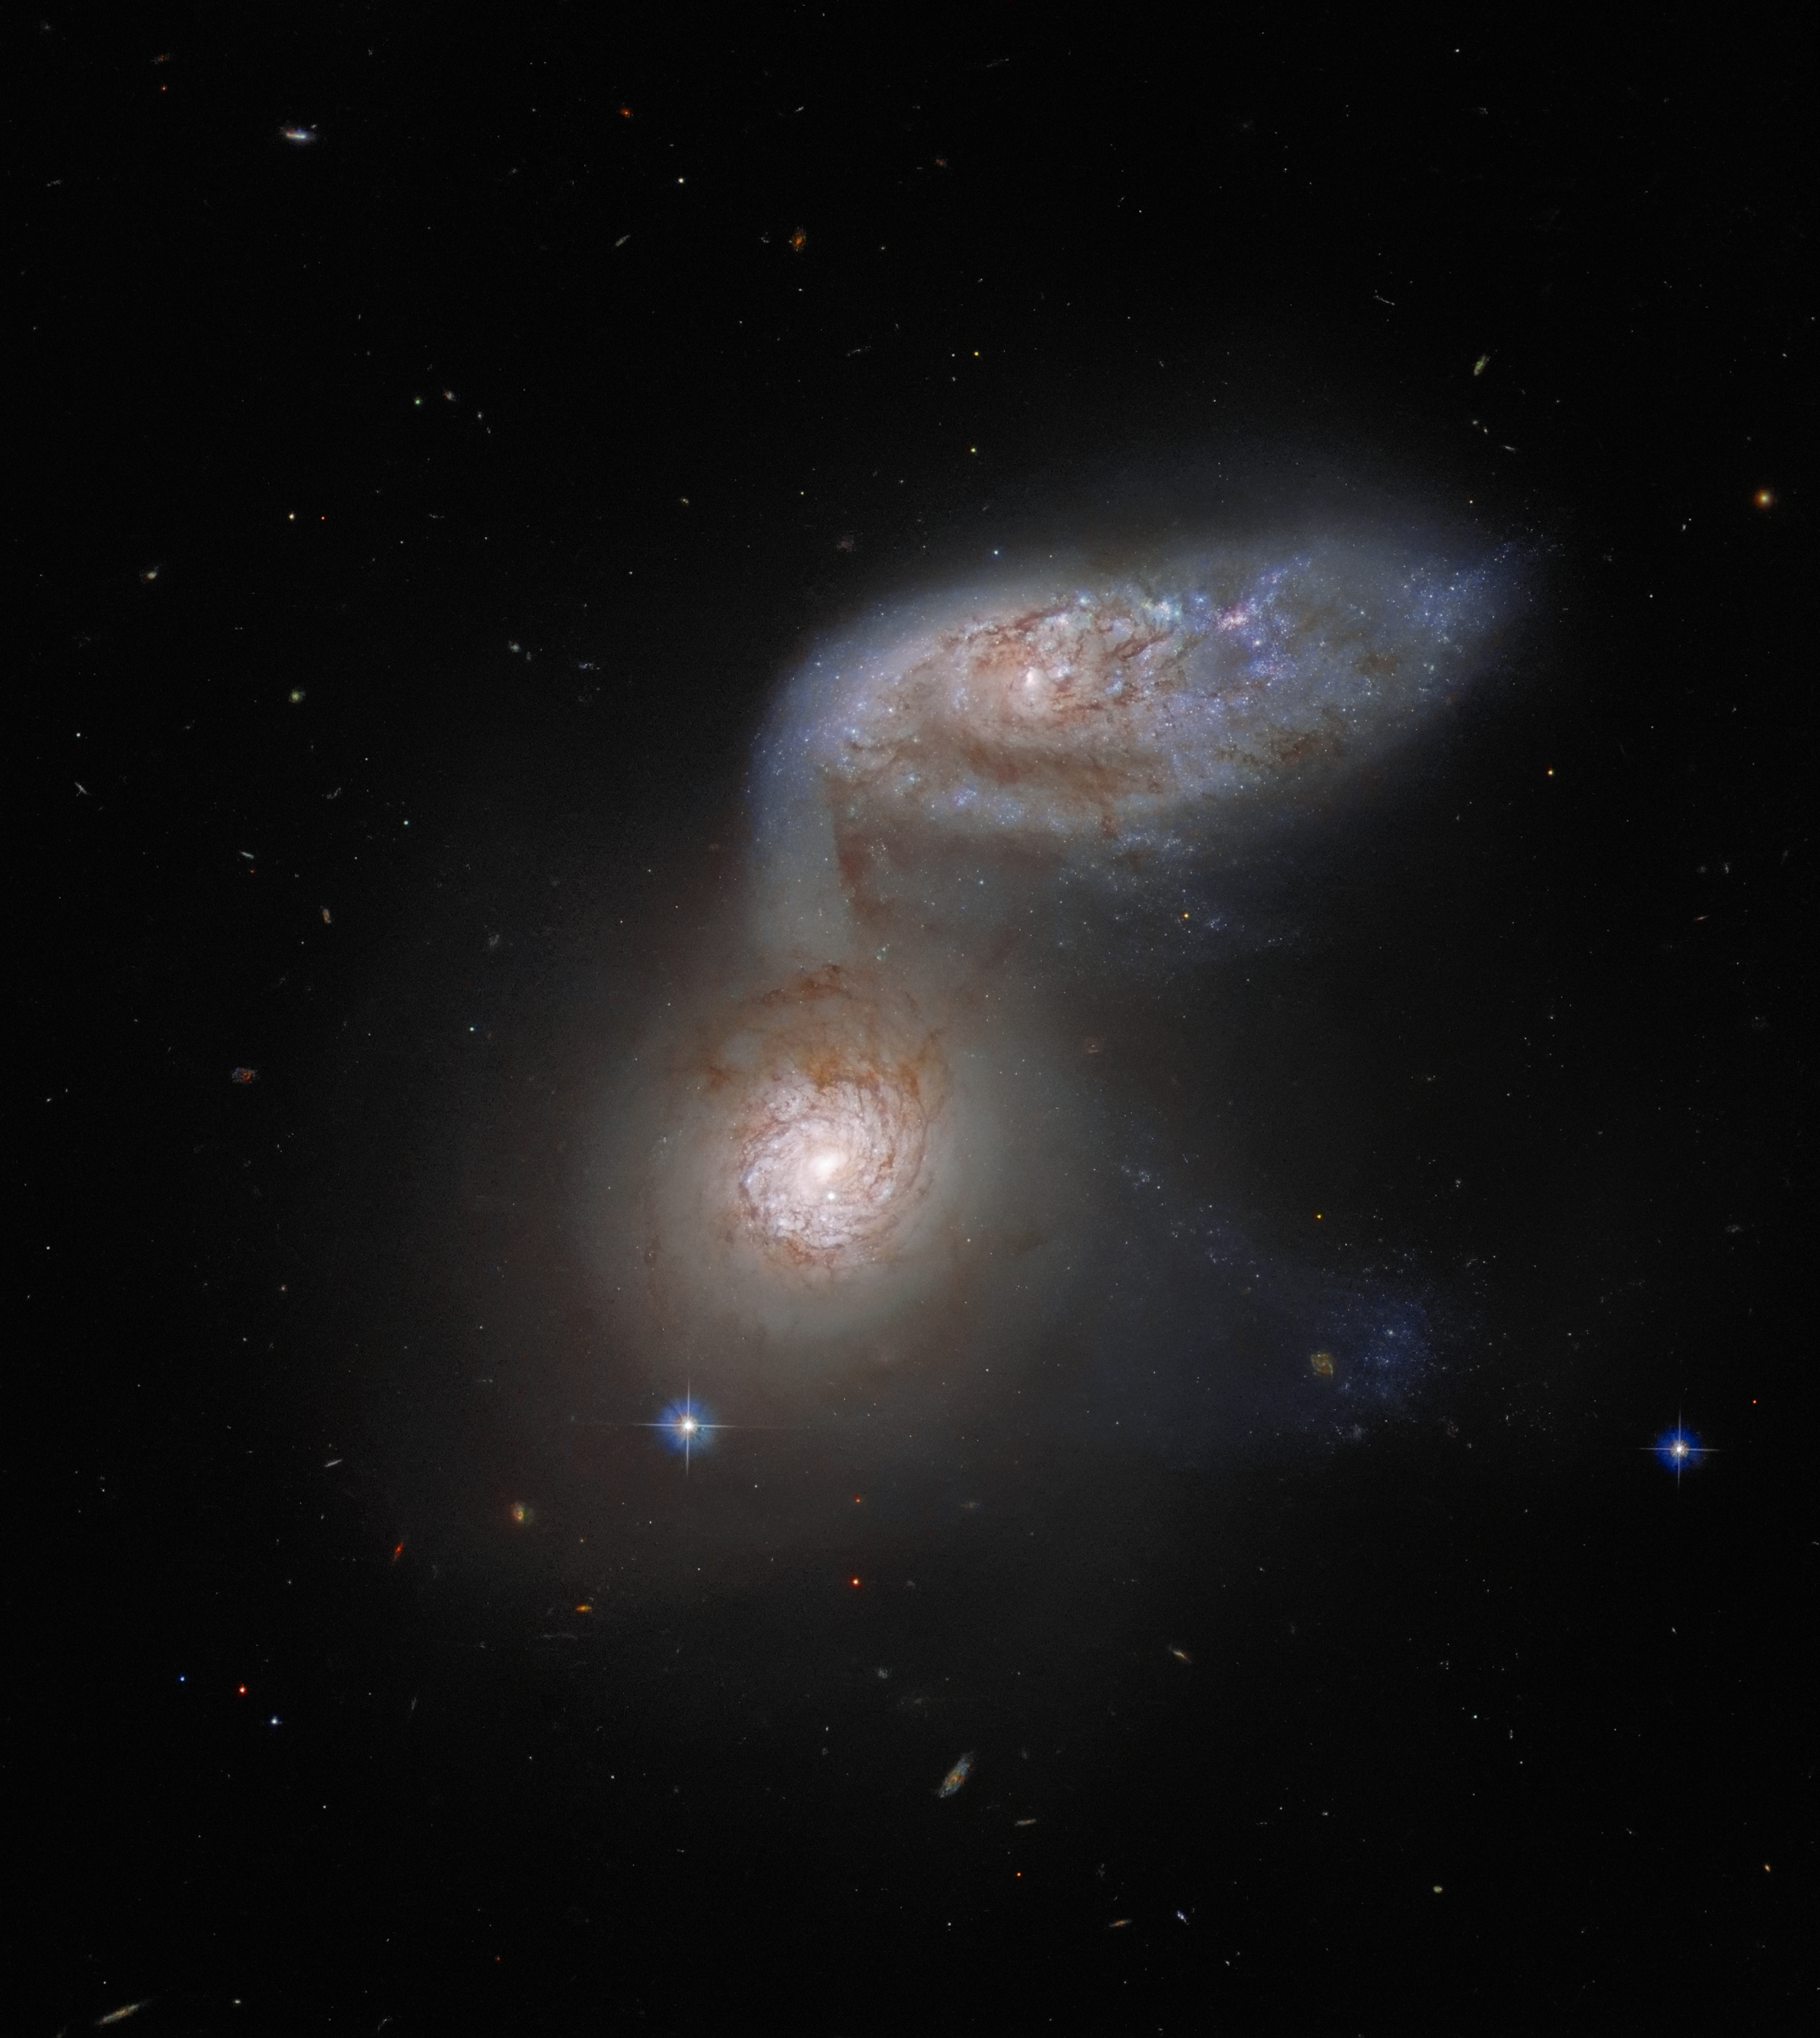

A Dangerous Dance

This Picture of the Week features two interacting galaxies that are so intertwined, they have a collective name — Arp 91. This delicate galactic dance is taking place over 100 million light-years from Earth, and was captured by the NASA/ESA Hubble Space Telescope. The two galaxies comprising Arp 91 do have their own names: the lower galaxy, which in this image looks like a bright spot, is known as NGC 5953; and the ovoid galaxy to the upper right is NGC 5954. In reality, both of these galaxies are spiral galaxies, but their shapes appear very different because they are orientated differently with respect to Earth.

Arp 91 provides a particularly vivid example of galactic interaction. NGC 5954 is clearly being tugged towards NGC 5953 — it looks like it is extending one spiral arm downwards. It is the immense gravitational attraction of the two galaxies that is causing them to interact. Such gravitational interactions between galaxies are common, and are an important part of galactic evolution. Most astronomers nowadays believe that collisions between spiral galaxies lead to the formation of another type of galaxy, known as elliptical galaxies. These immensely energetic and massive collisions, however, happen on timescales that dwarf a human lifetime — they take place over hundreds of millions of years. So we should not expect Arp 91 to look any different over the course of our lifetimes!

Credit: ESA/Hubble & NASA, J. Dalcanton Acknowledgement: J. Schmidt